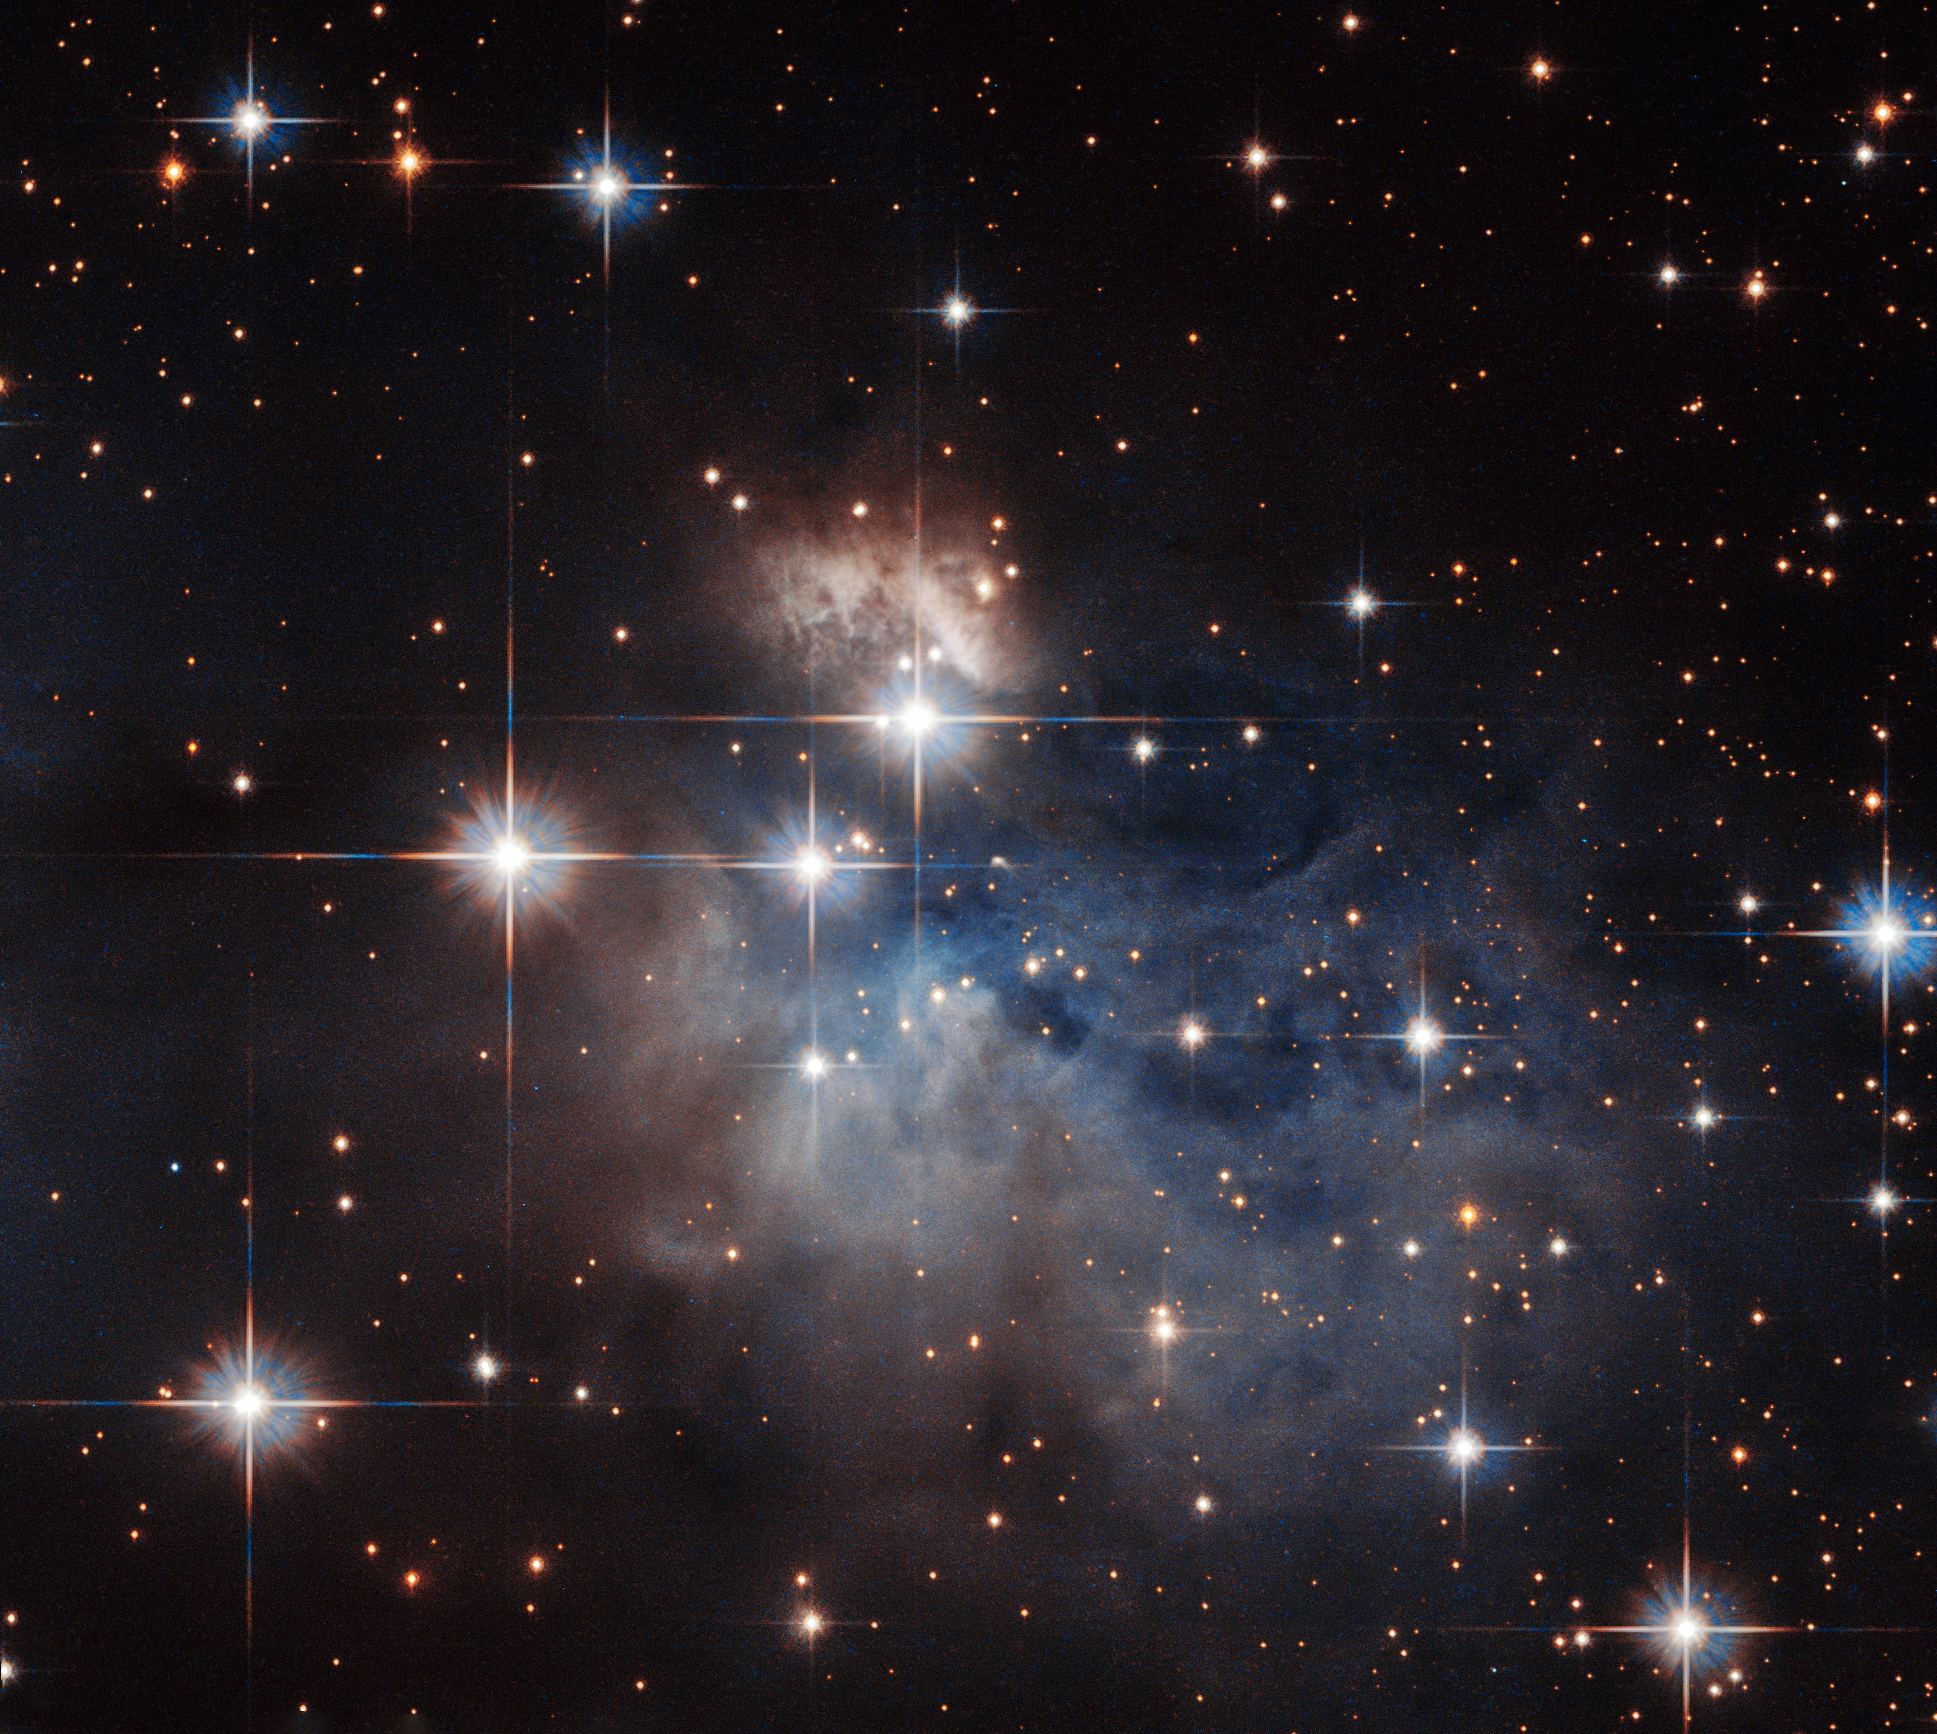

A stellar fingerprint

Showcased at the centre of this NASA/ESA Hubble Space Telescope image is an emission-line star known as IRAS 12196-6300.

Located just under 2300 light-years from Earth, this star displays prominent emission lines, meaning that the star’s light, dispersed into a spectrum, shows up as a rainbow of colours marked with a characteristic pattern of dark and bright lines. The characteristics of these lines, when compared to the “fingerprints” left by particular atoms and molecules, can be used to reveal IRAS 12196-6300’s chemical composition.

Under 10 million years old and not yet burning hydrogen at its core, unlike the Sun, this star is still in its infancy. Further evidence of IRAS 12196-6300’s youth is provided by the presence of reflection nebulae. These hazy clouds, pictured floating above and below IRAS 12196-6300, are created when light from a star reflects off a high concentration of nearby dust, such as the dusty material still remaining from IRAS 12196-6300’s formation.

Credit: ESA/Hubble & NASA Acknowledgement: Judy Schmidt (Geckzilla)